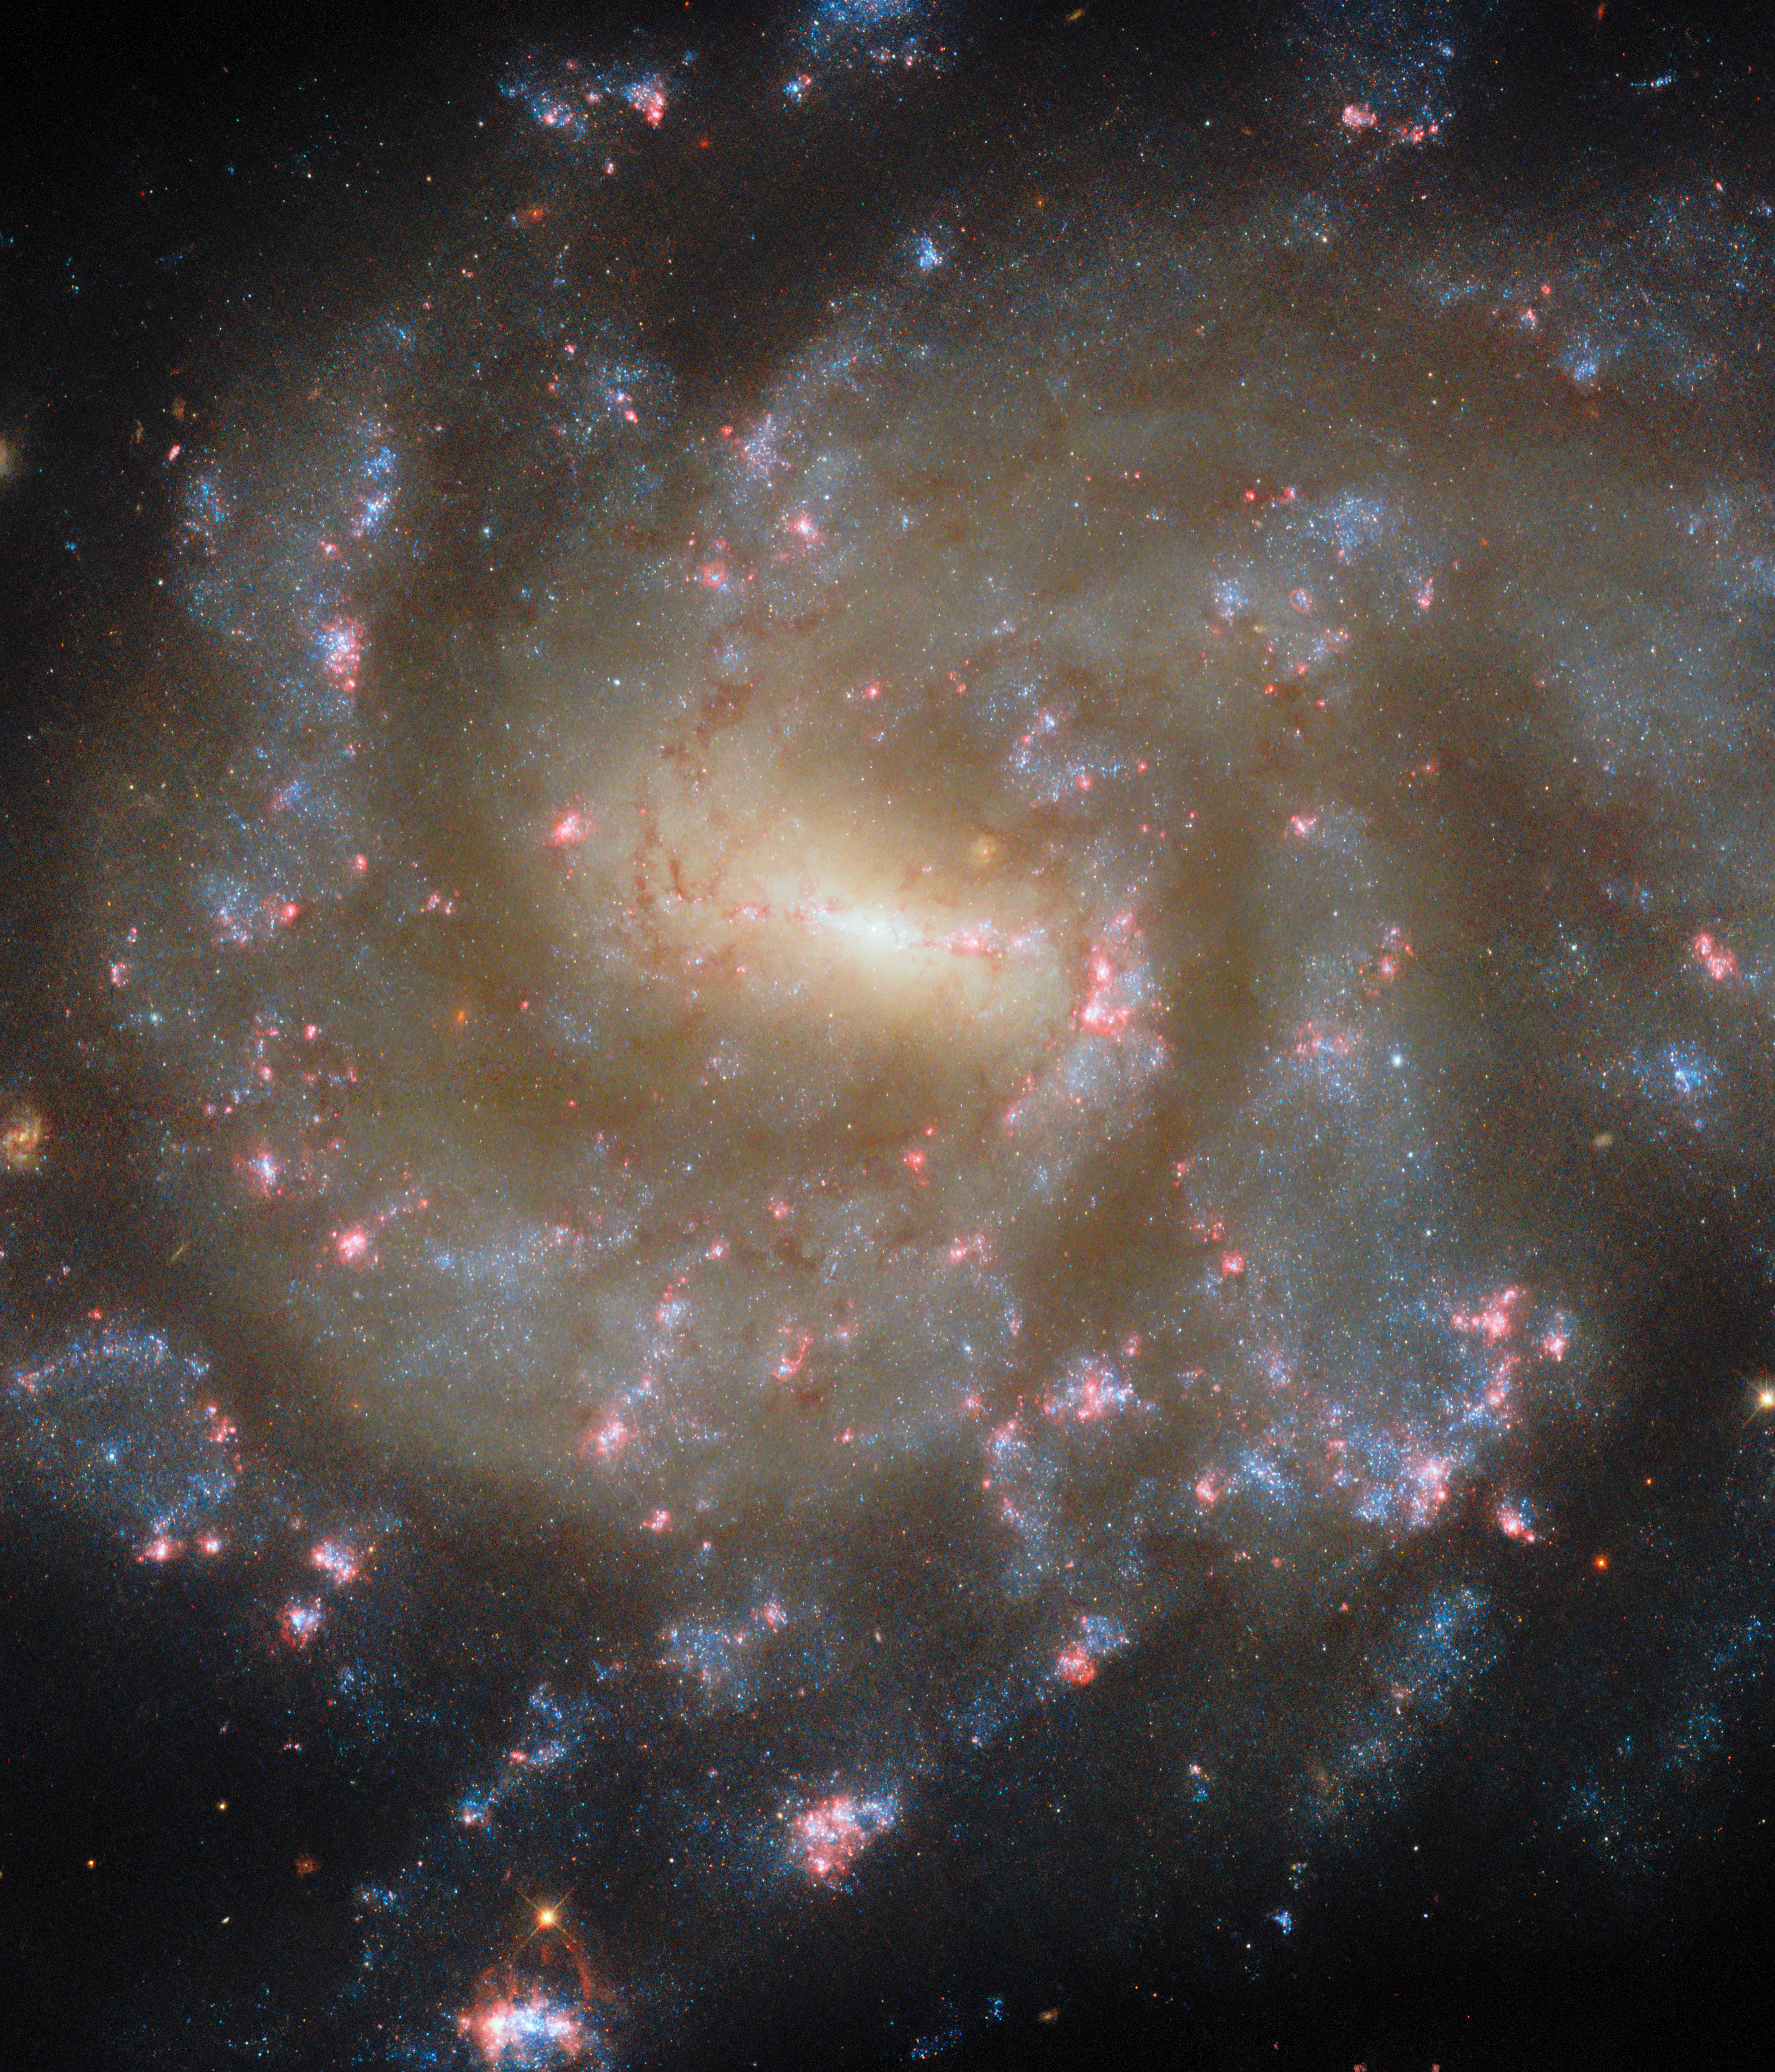

Starry spectacle

A galaxy ablaze with young stars is the subject of today’s NASA/ESA Hubble Space Telescope Picture of the Week. This galaxy is called NGC 685 and is situated about 64 million light-years away in the constellation Eridanus (The River). NGC 685 is classified as a barred spiral because its feathery spiral arms sprout from the ends of a bar of stars at the galaxy’s centre. The Milky Way is also a barred spiral, but our galaxy is a little less than twice the size of NGC 685.

Astronomers used Hubble to study NGC 685 for two observing programmes, both of which focus on star formation. It’s no surprise that NGC 685 was chosen for these programmes: numerous patches of young blue stars highlight the galaxy’s spiral arms. Many of these star clusters are cocooned in pink gas clouds, which are called H II (pronounced ‘H-two’) regions. An H II region is a gas cloud that glows for a short time when particularly hot and massive stars are born. An especially eye-catching H II region peeks out at the bottom edge of the image. Despite the dozens of star-forming regions evident in this image, NGC 685 converts an amount of gas equivalent to less than half the mass of the Sun into stars each year.

The Hubble data collected for the two observing programmes will allow astronomers to catalogue 50 000 H II regions and 100 000 star clusters in nearby galaxies. By combining Hubble’s sensitive visible and ultraviolet observations with infrared data from the NASA/ESA/CSA James Webb Space Telescope and radio data from the Atacama Large Millimeter/submillimeter Array, researchers will peer into the depths of dusty stellar nurseries and illuminate the stars forming there.

Credit: ESA/Hubble & NASA, J. Lee, F. Belfiore